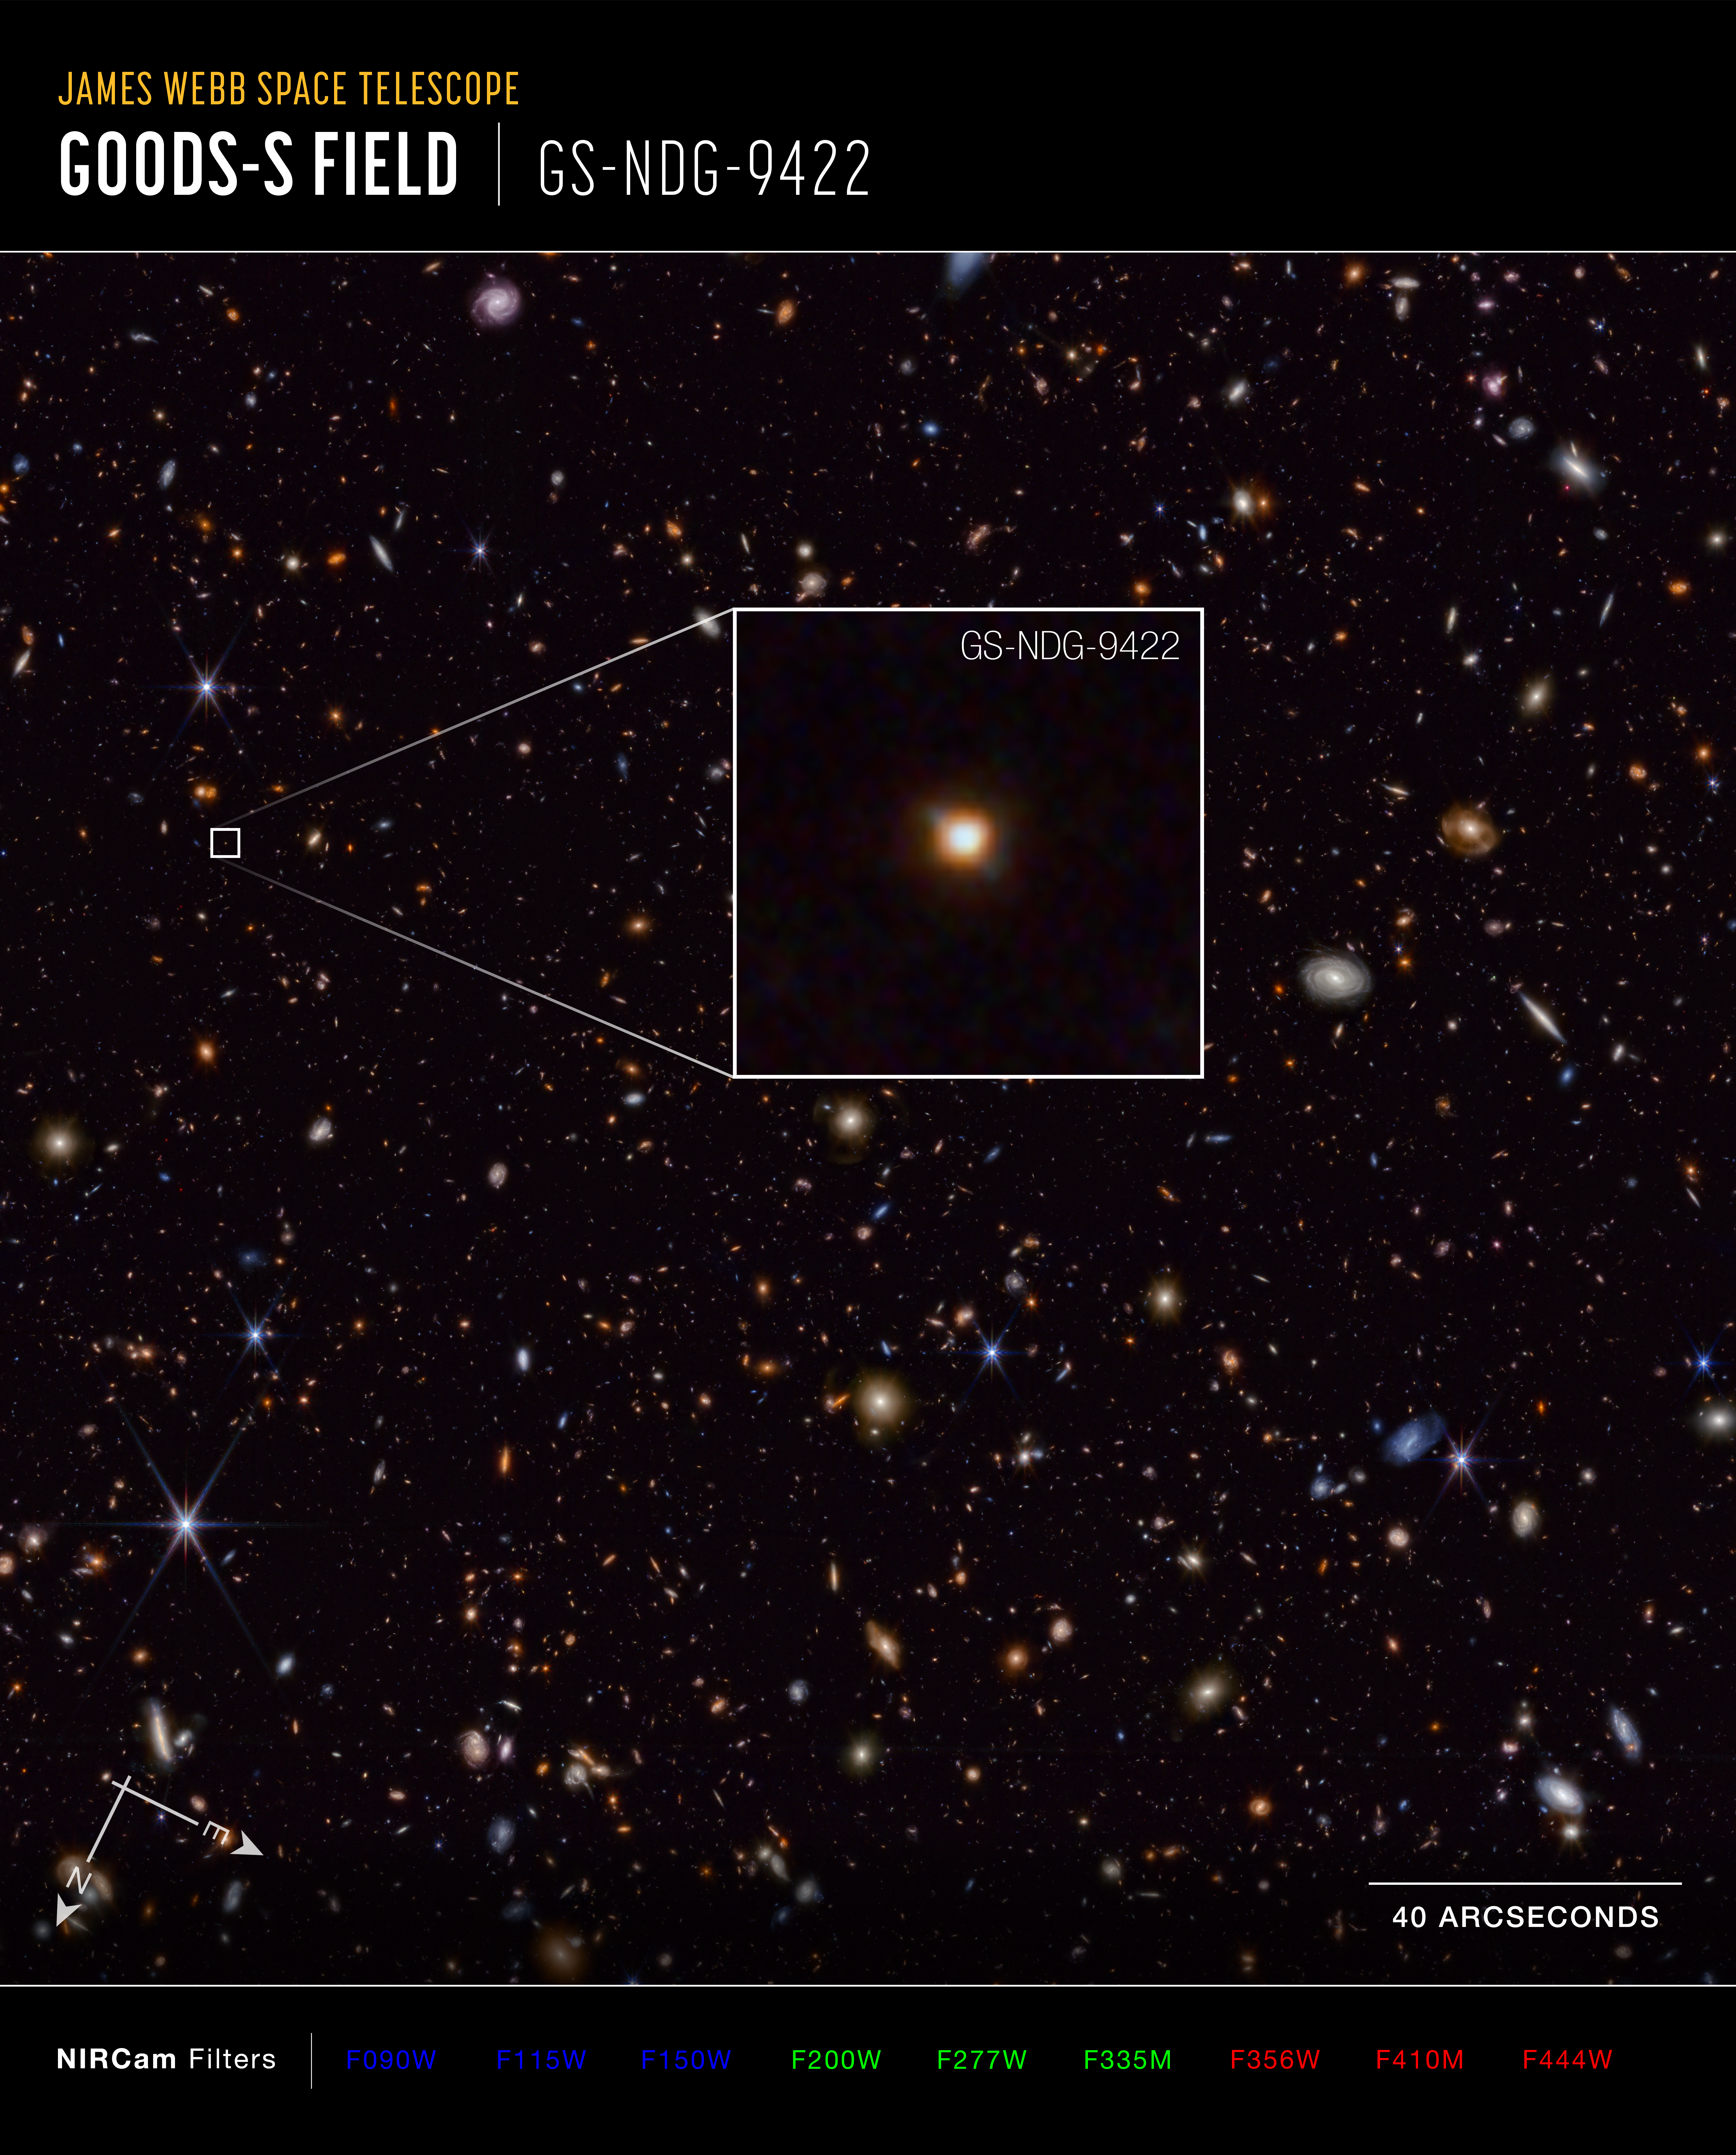

Galaxy GS-NDG-9422 (annotated)

The galaxy GS-NDG-9422 may easily have gone unnoticed. However, what appears as a faint blur in this James Webb Space Telescope image may actually be a groundbreaking discovery that points astronomers on a new path of understanding galaxy evolution in the early universe.

Detailed information on the galaxy’s chemical makeup, captured by Webb’s NIRSpec (Near-Infrared Spectrograph) instrument, indicates that the light we see in this image is coming from the galaxy’s hot gas, rather than its stars. That is the best explanation astronomers have discovered so far to explain the unexpected features in the light spectrum. They think that the galaxy’s stars are so extremely hot and massive that they are heating up the nebular gas in the galaxy to more than 80,000 degrees Celsius, allowing it to shine even brighter in near-infrared light than the stars themselves.

The authors of a new study on Webb’s observations of the galaxy think GS-NDG-9422 may represent a never-before-seen phase of galaxy evolution in the early universe, within the first billion years after the big bang. Their task now is to see if they can find more galaxies displaying the same features.

Credit: NASA, ESA, CSA, STScI, A. Cameron (University of Oxford)